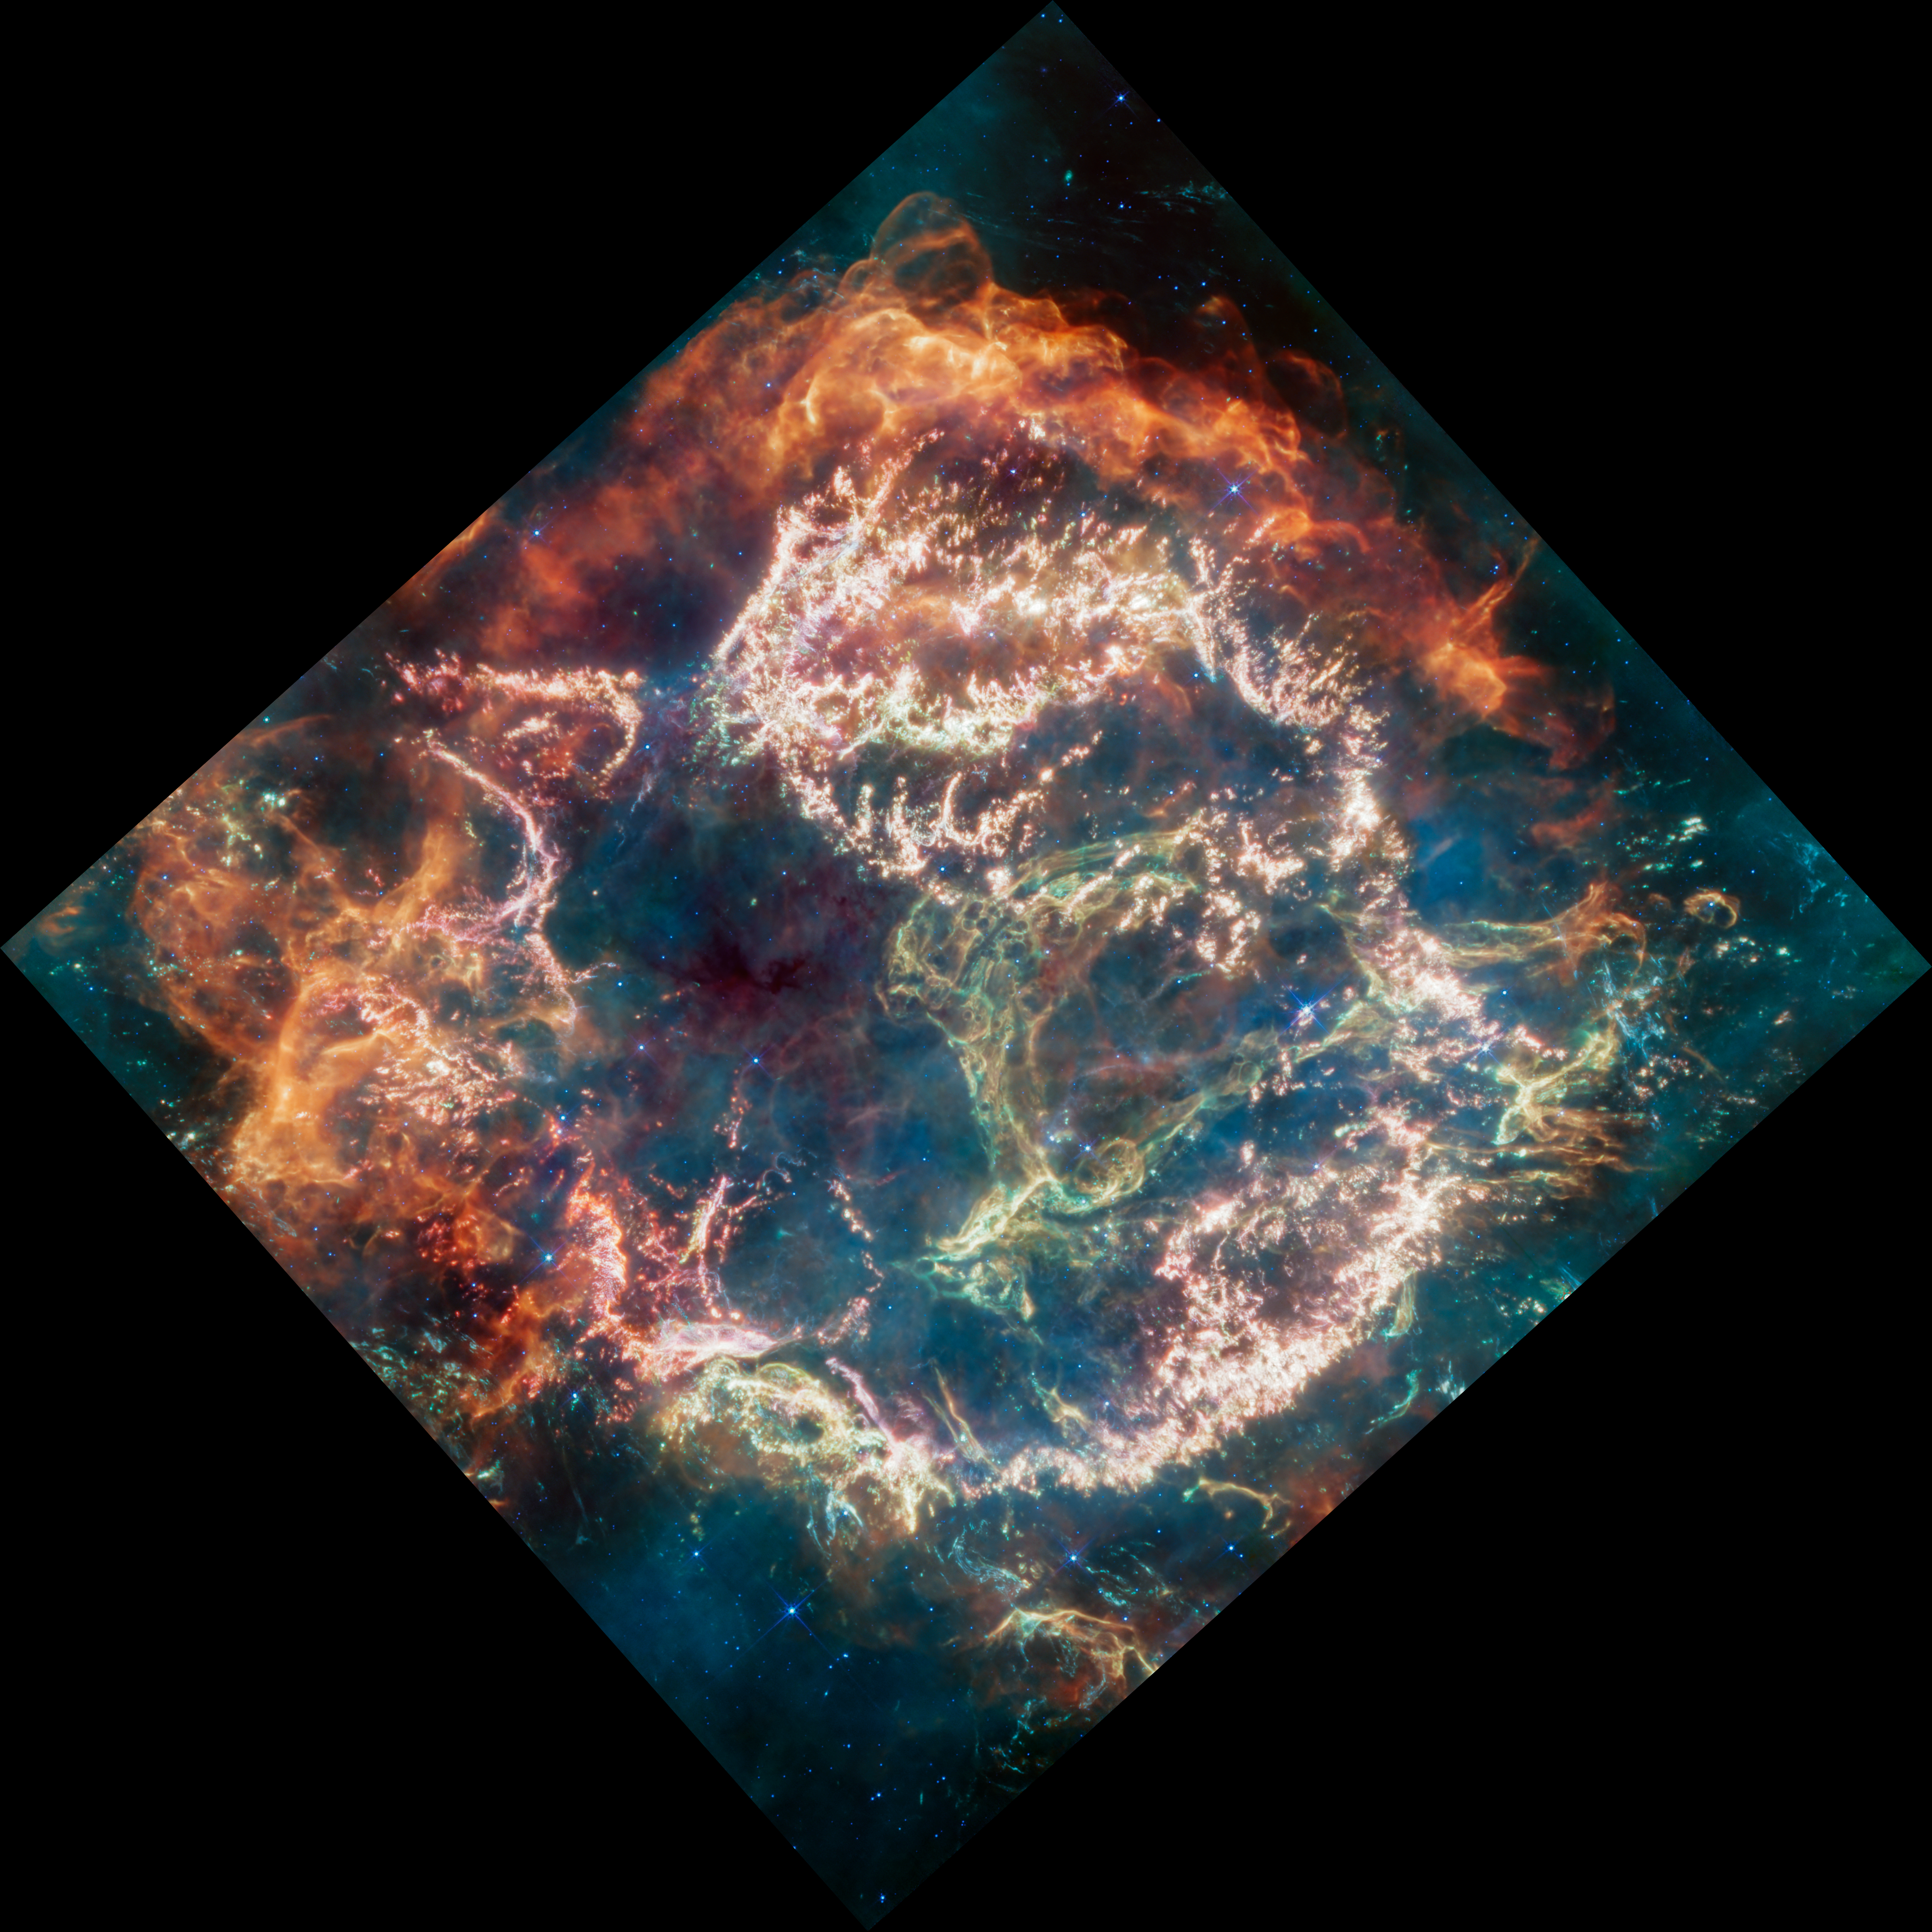

Cassiopeia A (MIRI Image)

Cassiopeia A (Cas A) is a supernova remnant located about 11,000 light-years from Earth in the constellation Cassiopeia. It spans approximately 10 light-years. This new image uses data from Webb’s Mid-Infrared Instrument (MIRI) to reveal Cas A in a new light.

On the remnant’s exterior, particularly at the top and left, lie curtains of material appearing orange and red due to emission from warm dust. This marks where ejected material from the exploded star is ramming into surrounding circumstellar material.

Interior to this outer shell lie mottled filaments of bright pink studded with clumps and knots. This represents material from the star itself, and likely shines due to a mix of various heavy elements and dust emission. The stellar material can also be seen as fainter wisps near the cavity’s interior.

A loop represented in green extends across the right side of the central cavity. Its shape and complexity are unexpected and challenging for scientists to understand.

This image combines various filters with the colour red assigned to 25.5 microns (F2550W), orange-red to 21 microns (F2100W), orange to 18 microns (F1800W), yellow to 12.8 microns (F1280W), green to 11.3 microns (F1130W), cyan to 10 microns (F1000W), light blue to 7.7 microns (F770W), and blue to 5.6 microns (F560W). The data comes from the general observer program 1947.

Credit: NASA, ESA, CSA, D. Milisavljevic (Purdue University), T. Temim (Princeton University), I. De Looze (UGent), J. DePasquale (STScI)